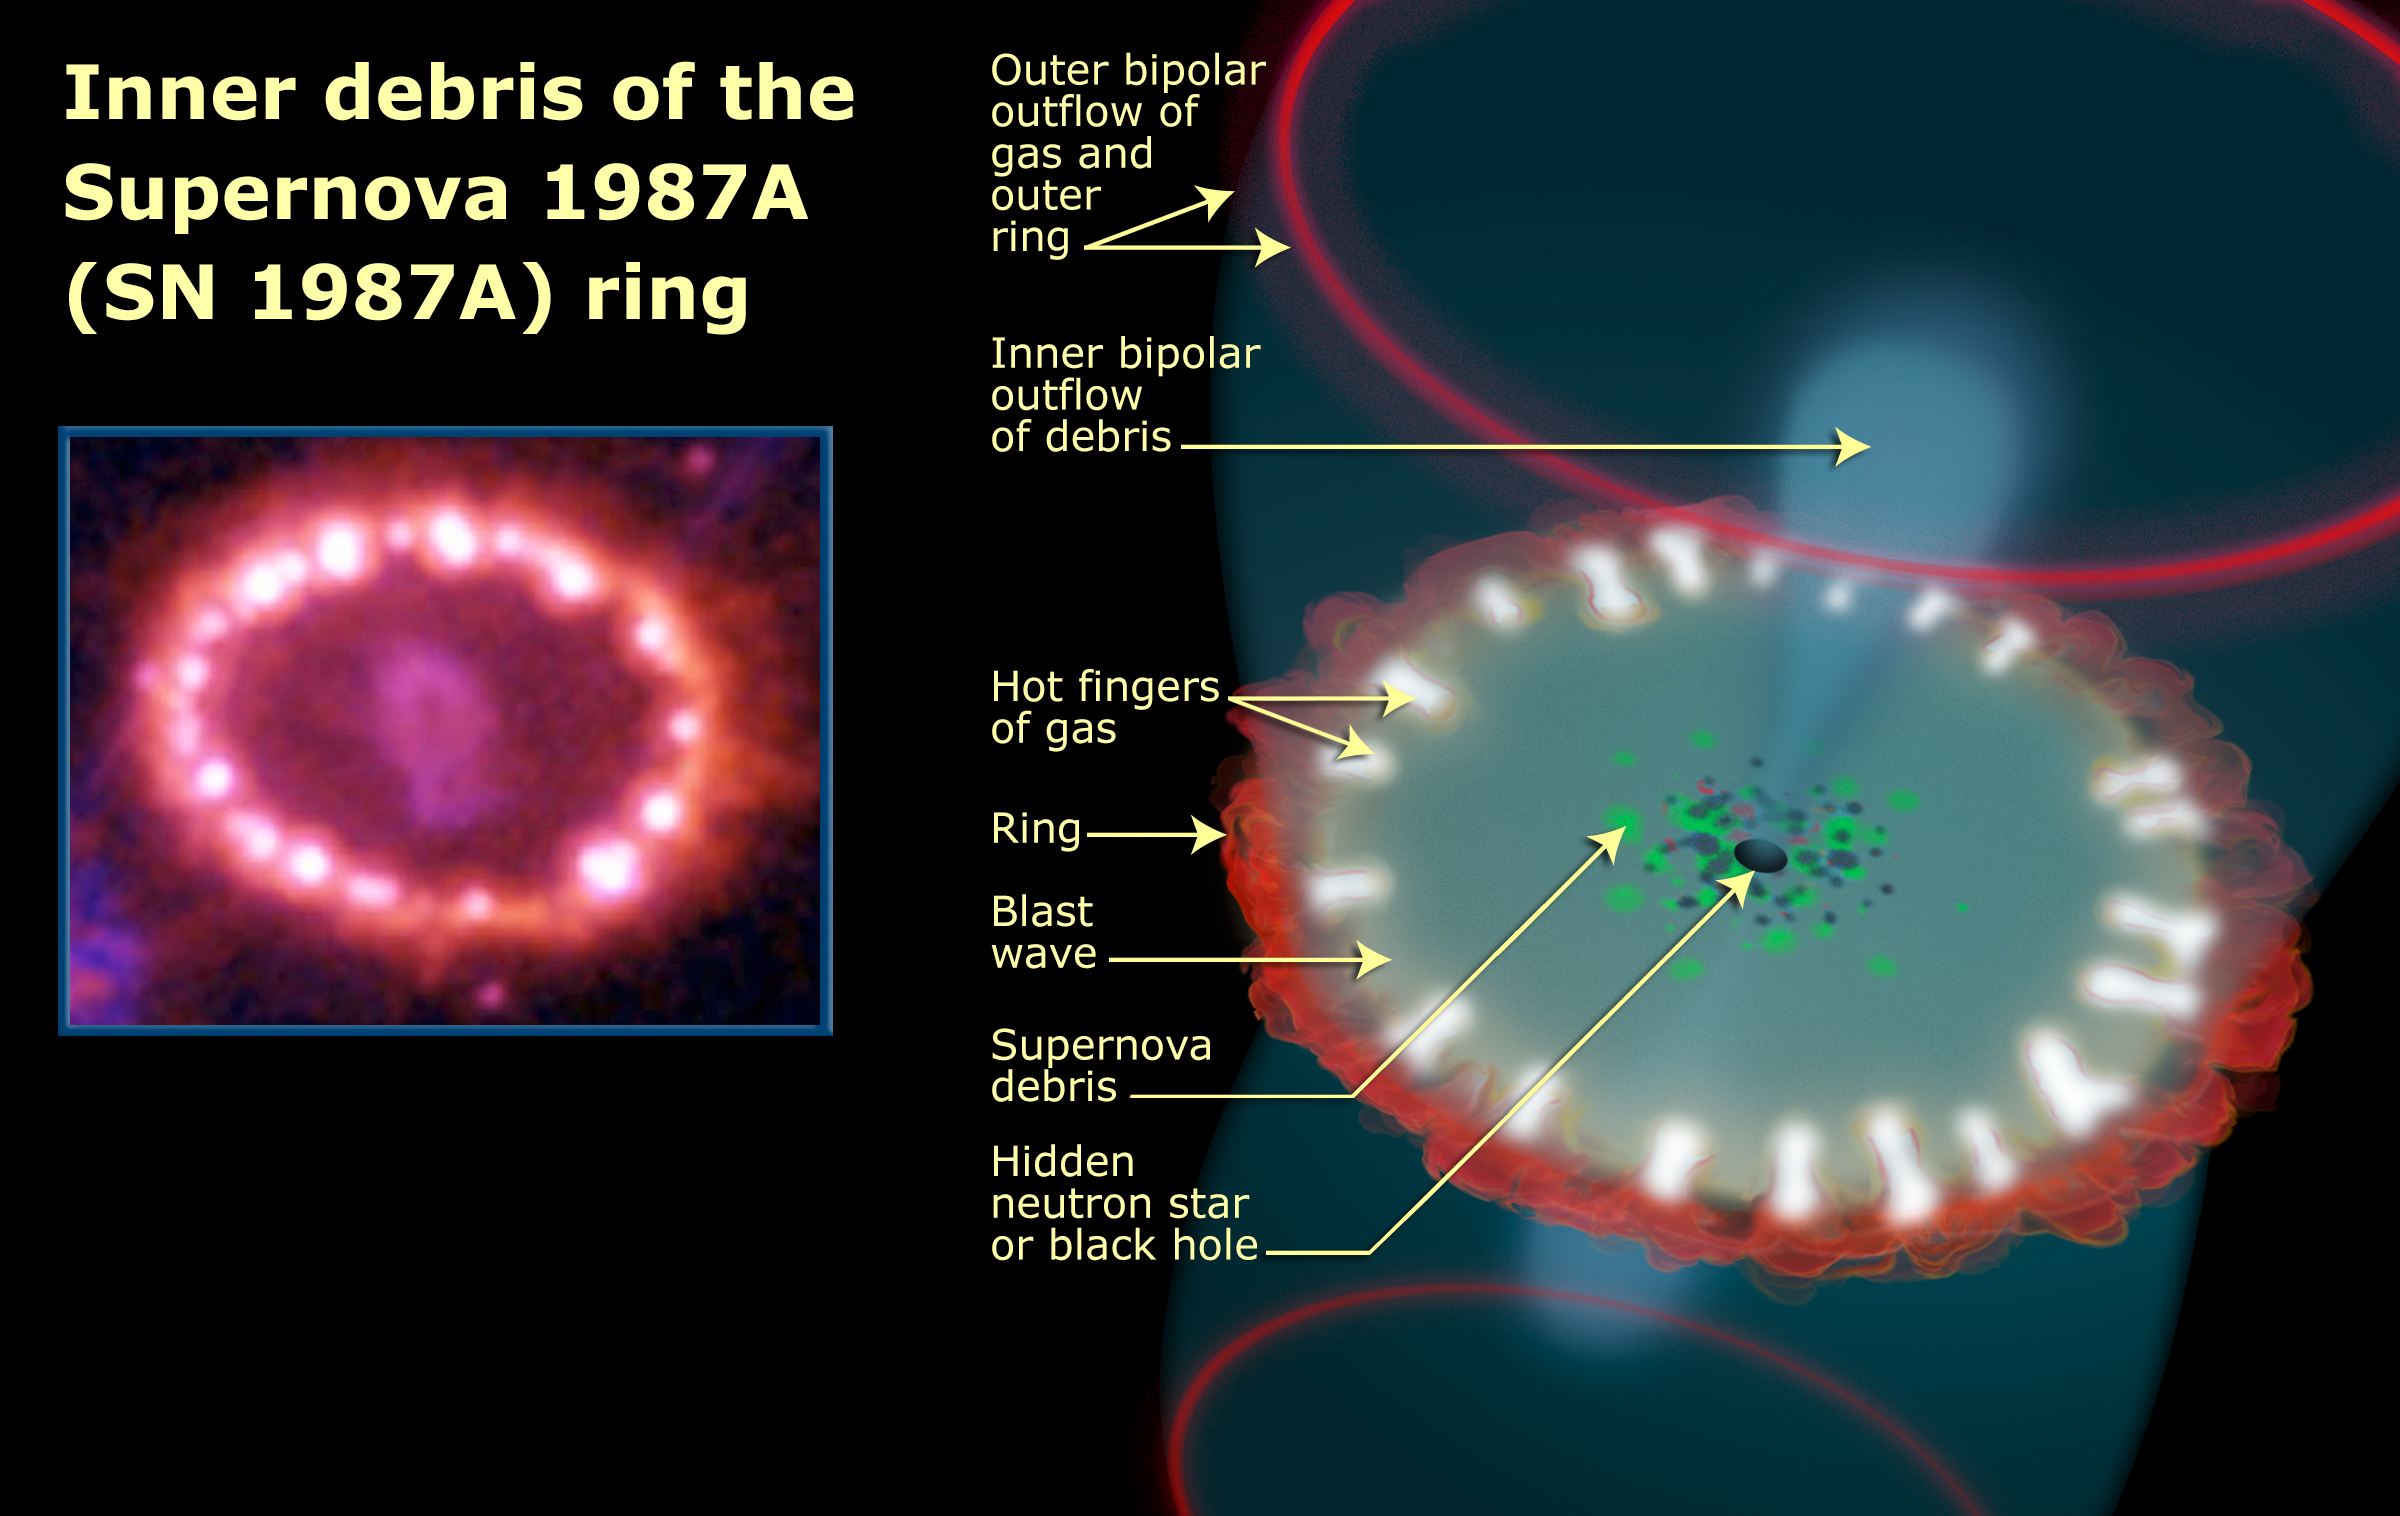

Inner Debris of the Supernova 1987A ring

This diagram shows the supernova's triple-ring system, including the bright spots along the inner ring of gas surrounding the exploded star. A shock wave of material unleashed by the stellar blast is slamming into regions along the inner ring, heating them up, and causing them to glow. The ring, about a light-year across, was probably shed by the star about 20 000 years before it exploded.

Credit: NASA, ESA, and A, Feild (STScI)